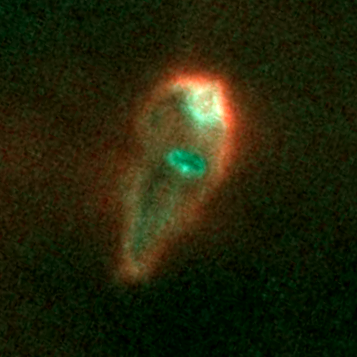

Proplyd in the Orion Nebula

In this picture, the disk is the green-colored oval near the center. Radiation from the hot star is heating up the disk, causing matter to dissipate, like steam evaporating from the surface of boiling water. A strong 'stellar wind, ' a stream of particles moving at 4, 500 to 8, 900 miles per hour (7, 200 to 14, 400 kilometers per hour), is propelling the material away from the disk. The material is glowing because it is being energized by radiation from the hot star.

Credit: NASA/ESA, J. Bally (University of Colorado, Boulder, CO), H. Throop (Southwest Research Institute, Boulder, CO), C.R. O'Dell (Vanderbilt University, Nashville, TN)